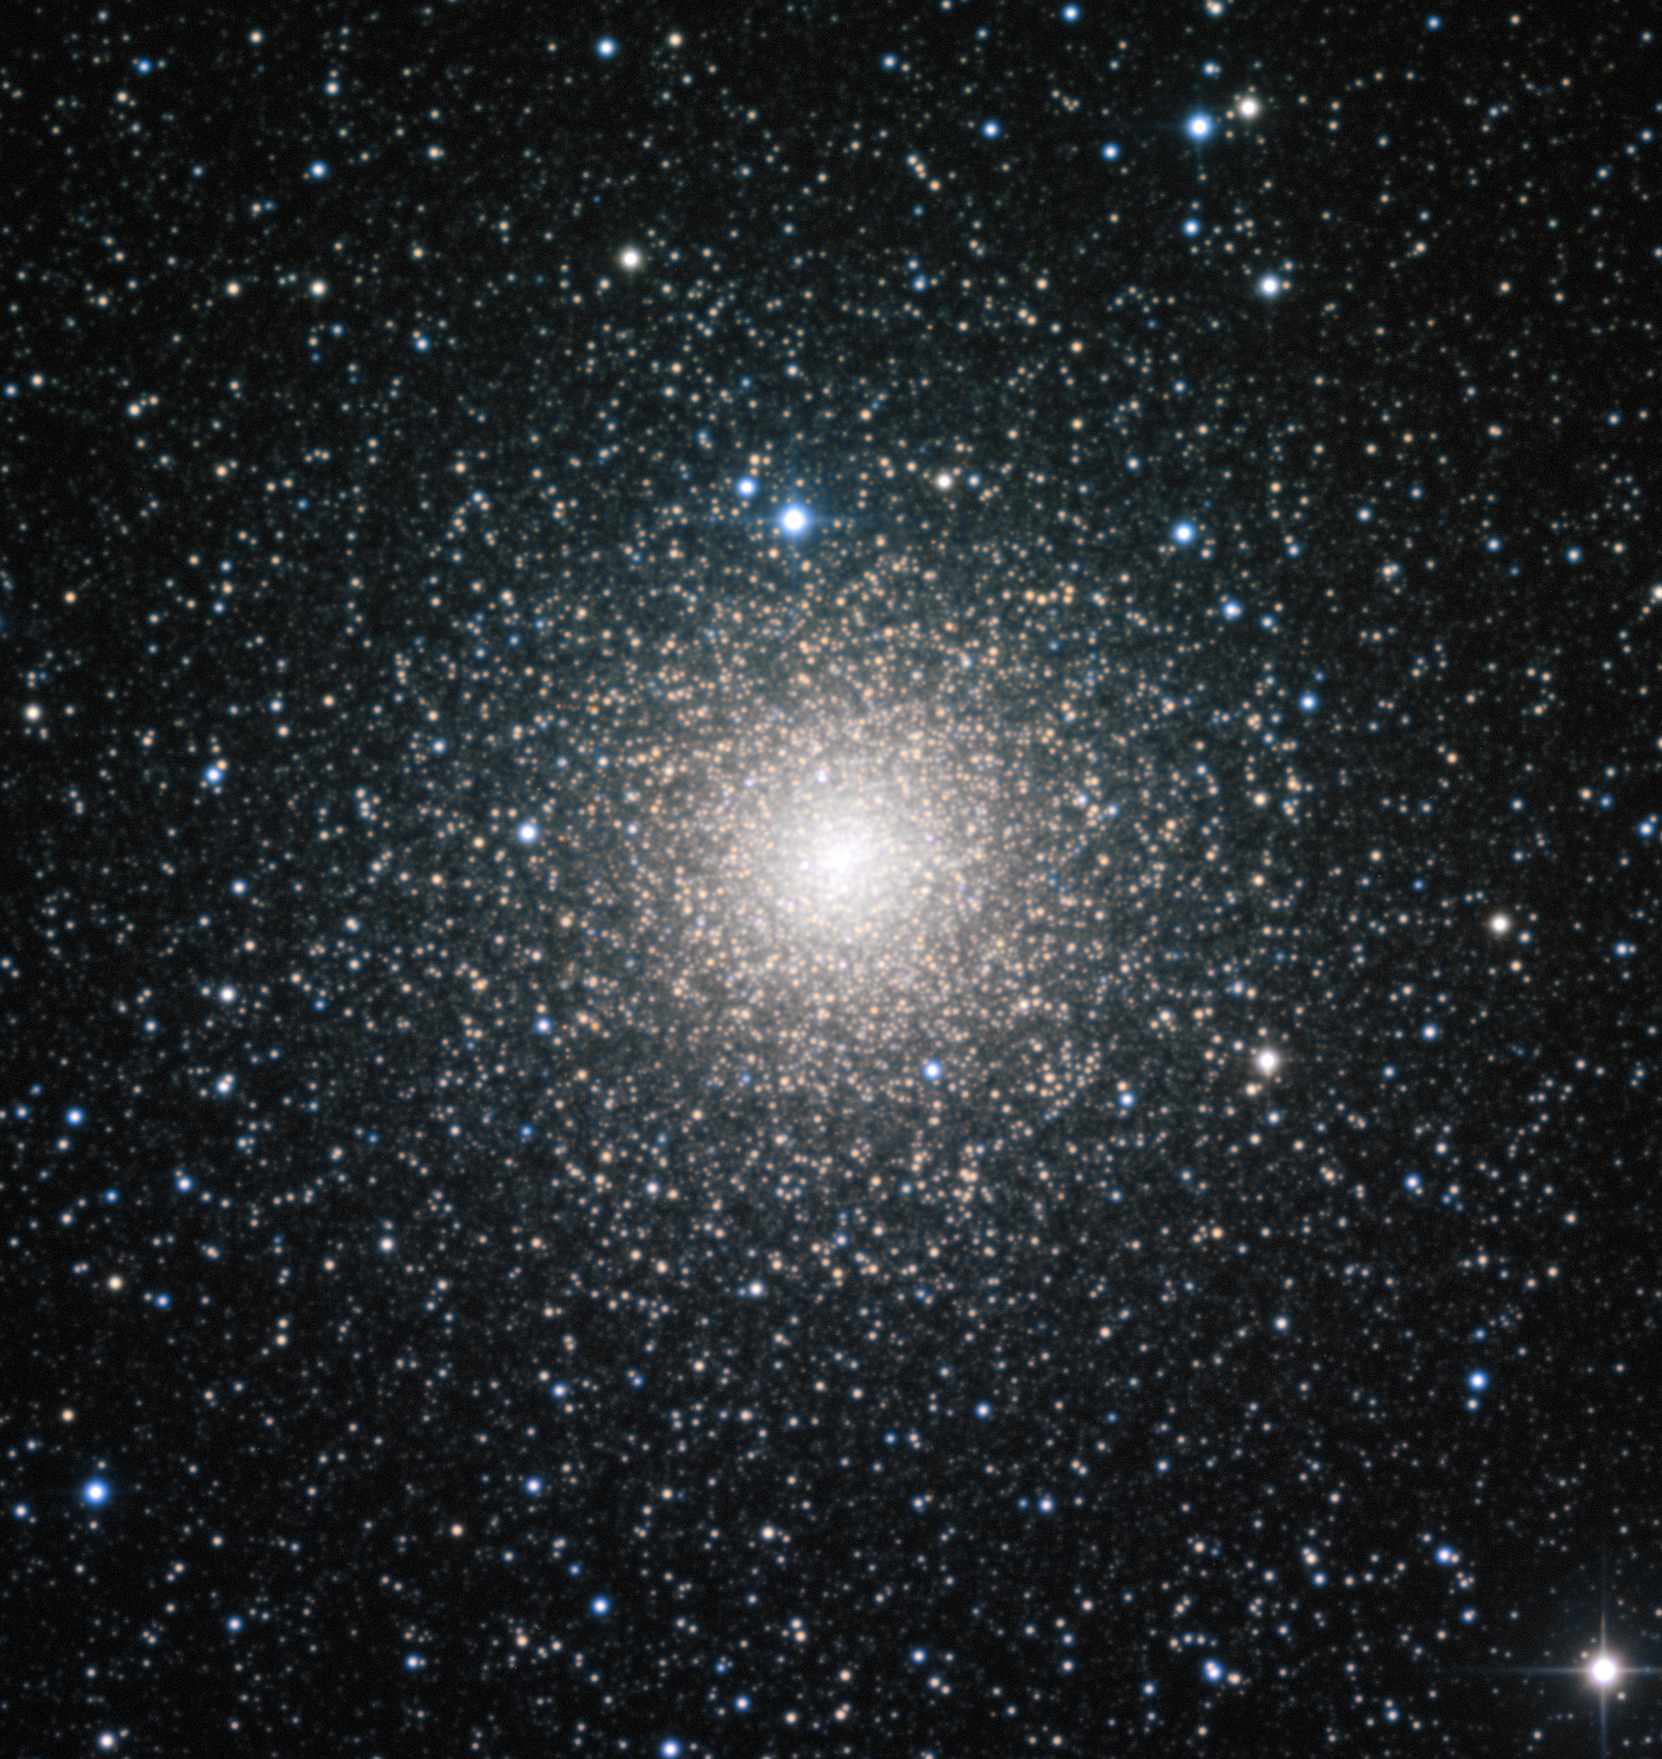

The globular cluster NGC 6388 observed by the MPG/ESO 2.2-metre telescope

This image from the MPG/ESO 2.2-metre telescope at the ESO La Silla Observatory shows NGC 6388, a dynamically middle-aged globular cluster in the Milky Way. While the cluster formed in the distant past (like all globular clusters, it is over ten billion years old), a study of the distribution of bright blue stars within the cluster shows that it has aged at a moderate speed, and its heaviest stars are in the process of migrating to the centre.

A new study using ESO data has discovered that globular clusters of the same age can have dramatically different distributions of blue straggler stars within them, suggesting that clusters can age at substantially different rates.

Credit: ESO, F. Ferraro (University of Bologna)